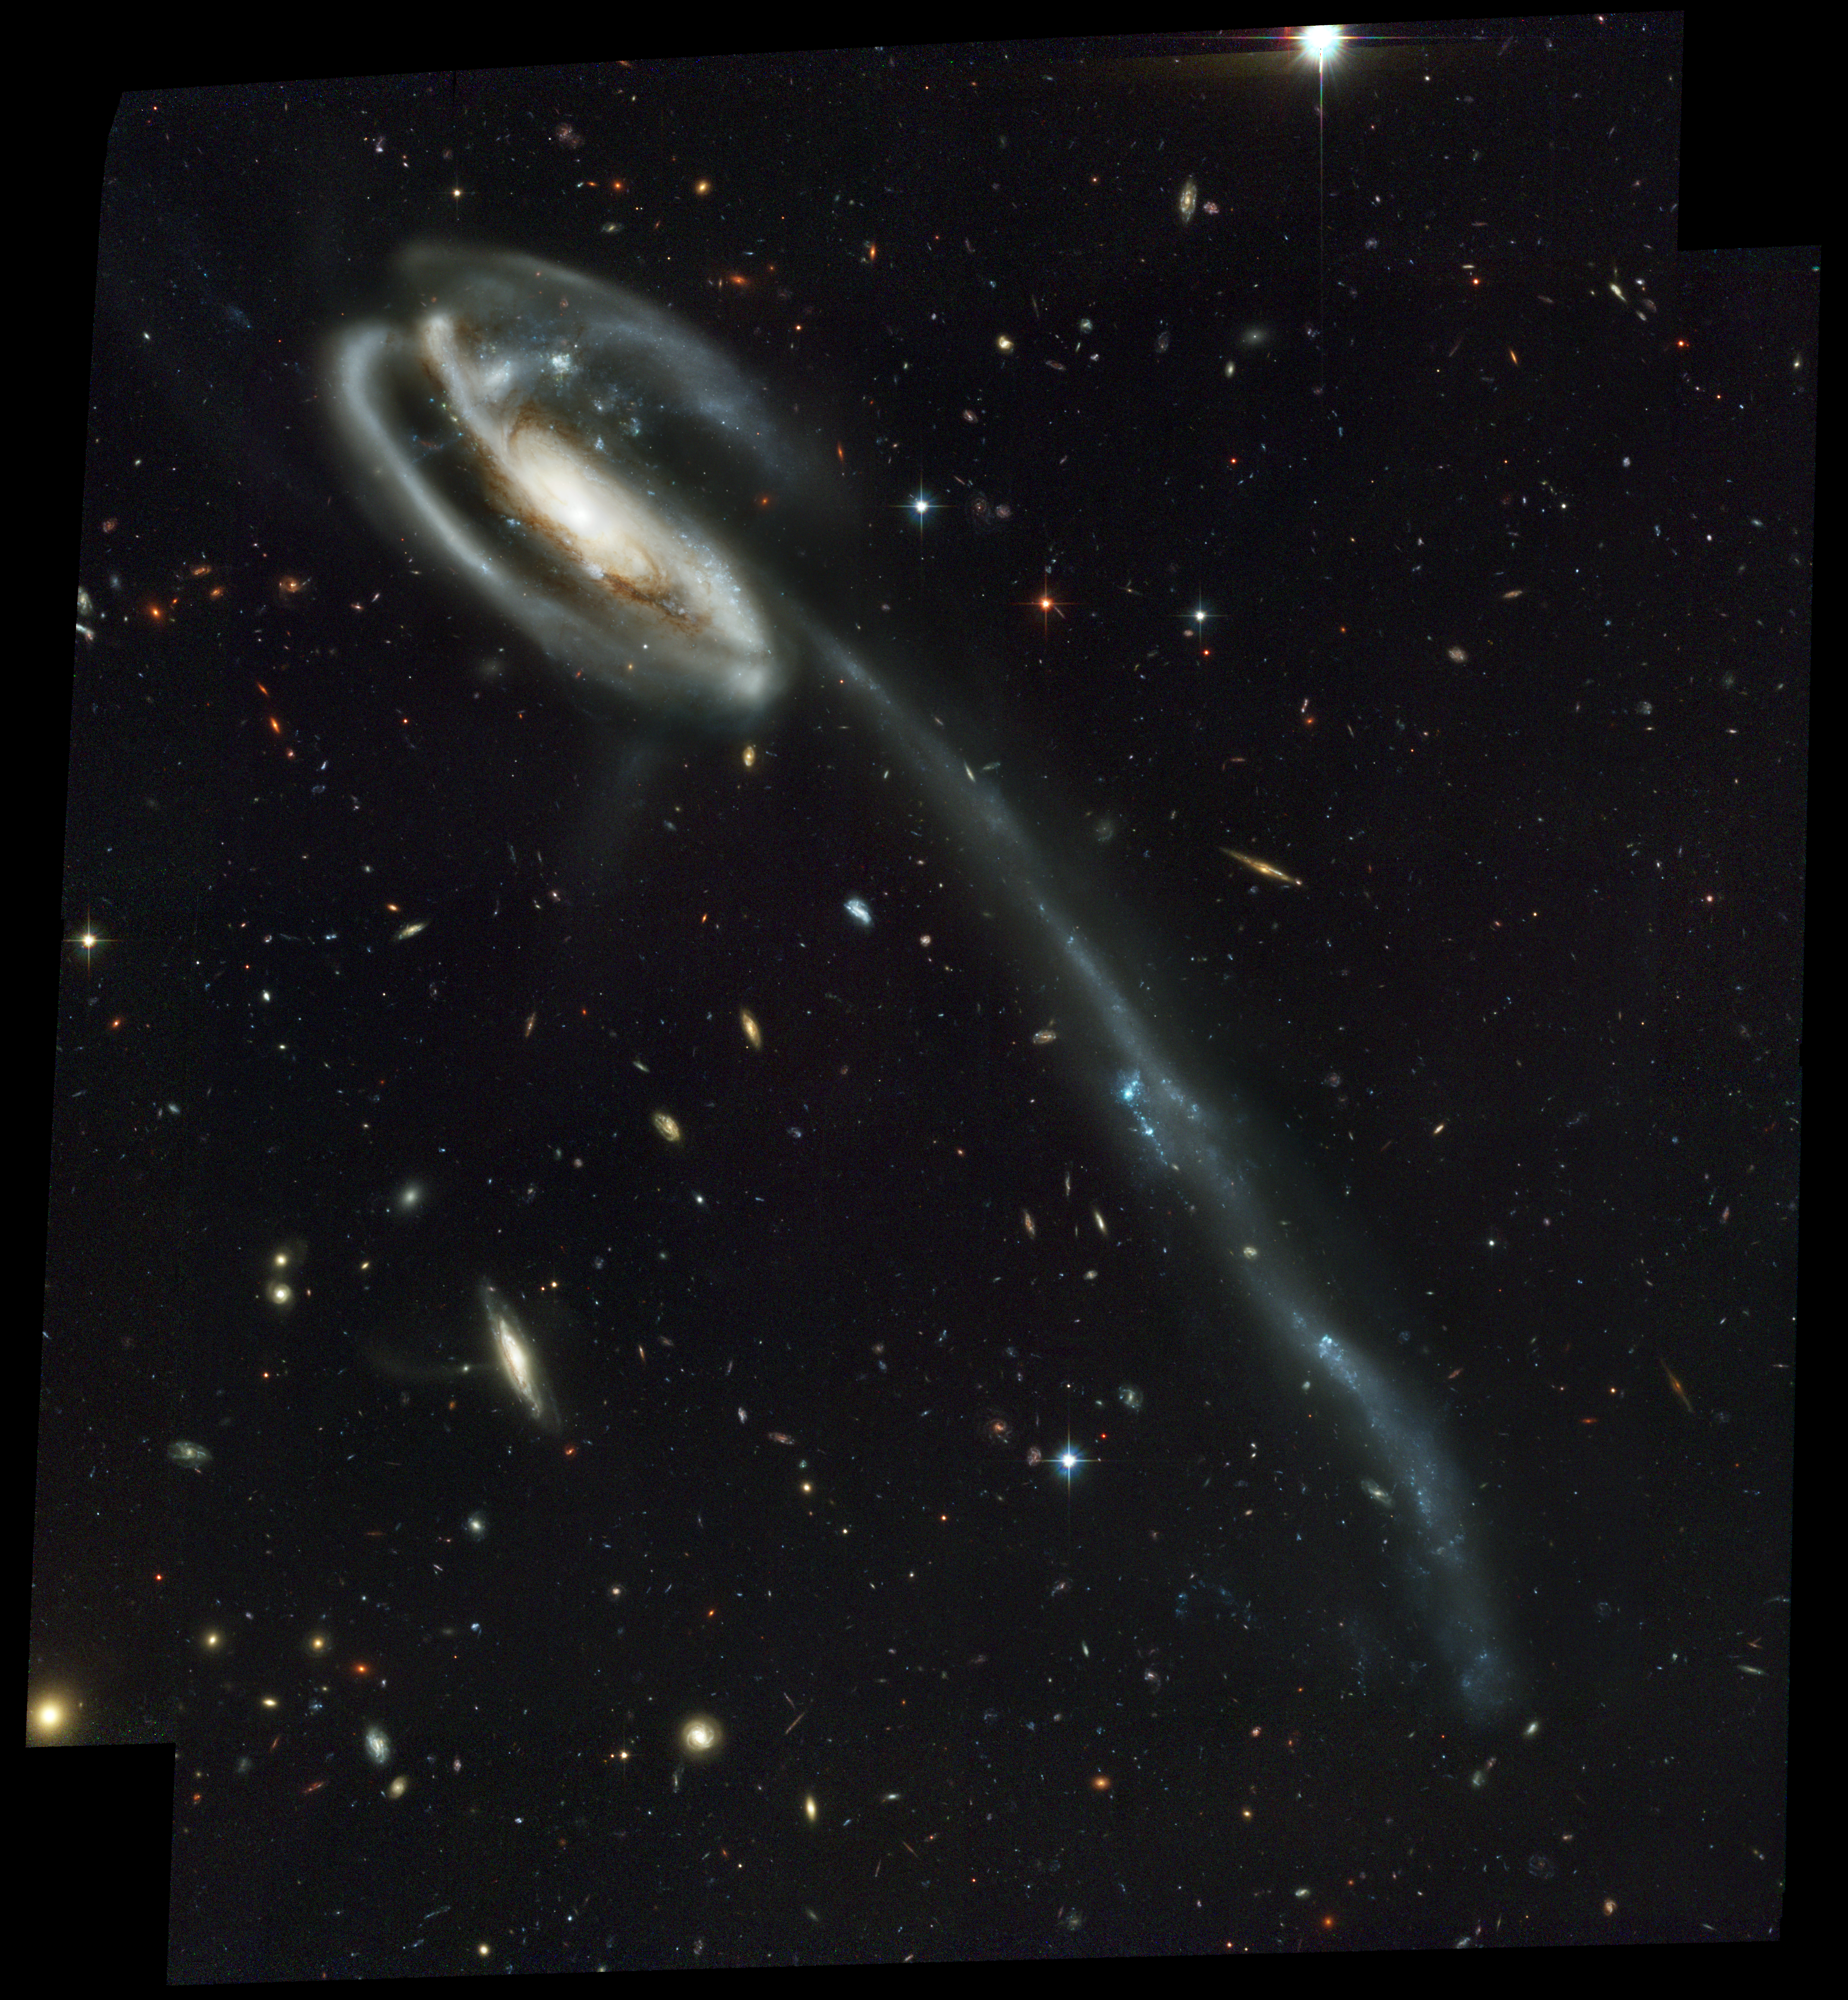

UGC 10214 (ACS Full Field Image)

A colliding galaxy dubbed the "Tadpole" (catalog name UGC10214) is set against a rich tapestry of 6,000 galaxies. The Tadpole, with its long tail of stars, looks like a runaway pinwheel firework, unlike the textbook images of stately spiral galaxies. Its distorted shape was caused by a small interloper, a very blue, compact galaxy visible near the more massive Tadpole. The Tadpole resides about 420 million light-years away in the constellation Draco. Seen shining through the Tadpole's disk, the tiny intruder is likely a hit-and-run galaxy that is now leaving the scene of the accident. Strong gravitational forces from the interaction created the long tail of debris, consisting of stars and gas that stretch out more than 280,000 light-years.

Credit: NASA, H. Ford (JHU), G. Illingworth (UCSC/LO), M.Clampin (STScI), G. Hartig (STScI), the ACS Science Team, and ESAThe ACS Science Team: H. Ford, G. Illingworth, M. Clampin, G. Hartig, T. Allen, K. Anderson, F. Bartko, N. Benitez, J. Blakeslee, R. Bouwens, T. Broadhurst, R. Brown, C. Burrows, D. Campbell, E. Cheng, N. Cross, P. Feldman, M. Franx, D. Golimowski, C. Gronwall, R. Kimble, J. Krist, M. Lesser, D. Magee, A. Martel, W. J. McCann, G. Meurer, G. Miley, M. Postman, P. Rosati, M. Sirianni, W. Sparks, P. Sullivan, H. Tran, Z. Tsvetanov, R. White, and R. Woodruff.